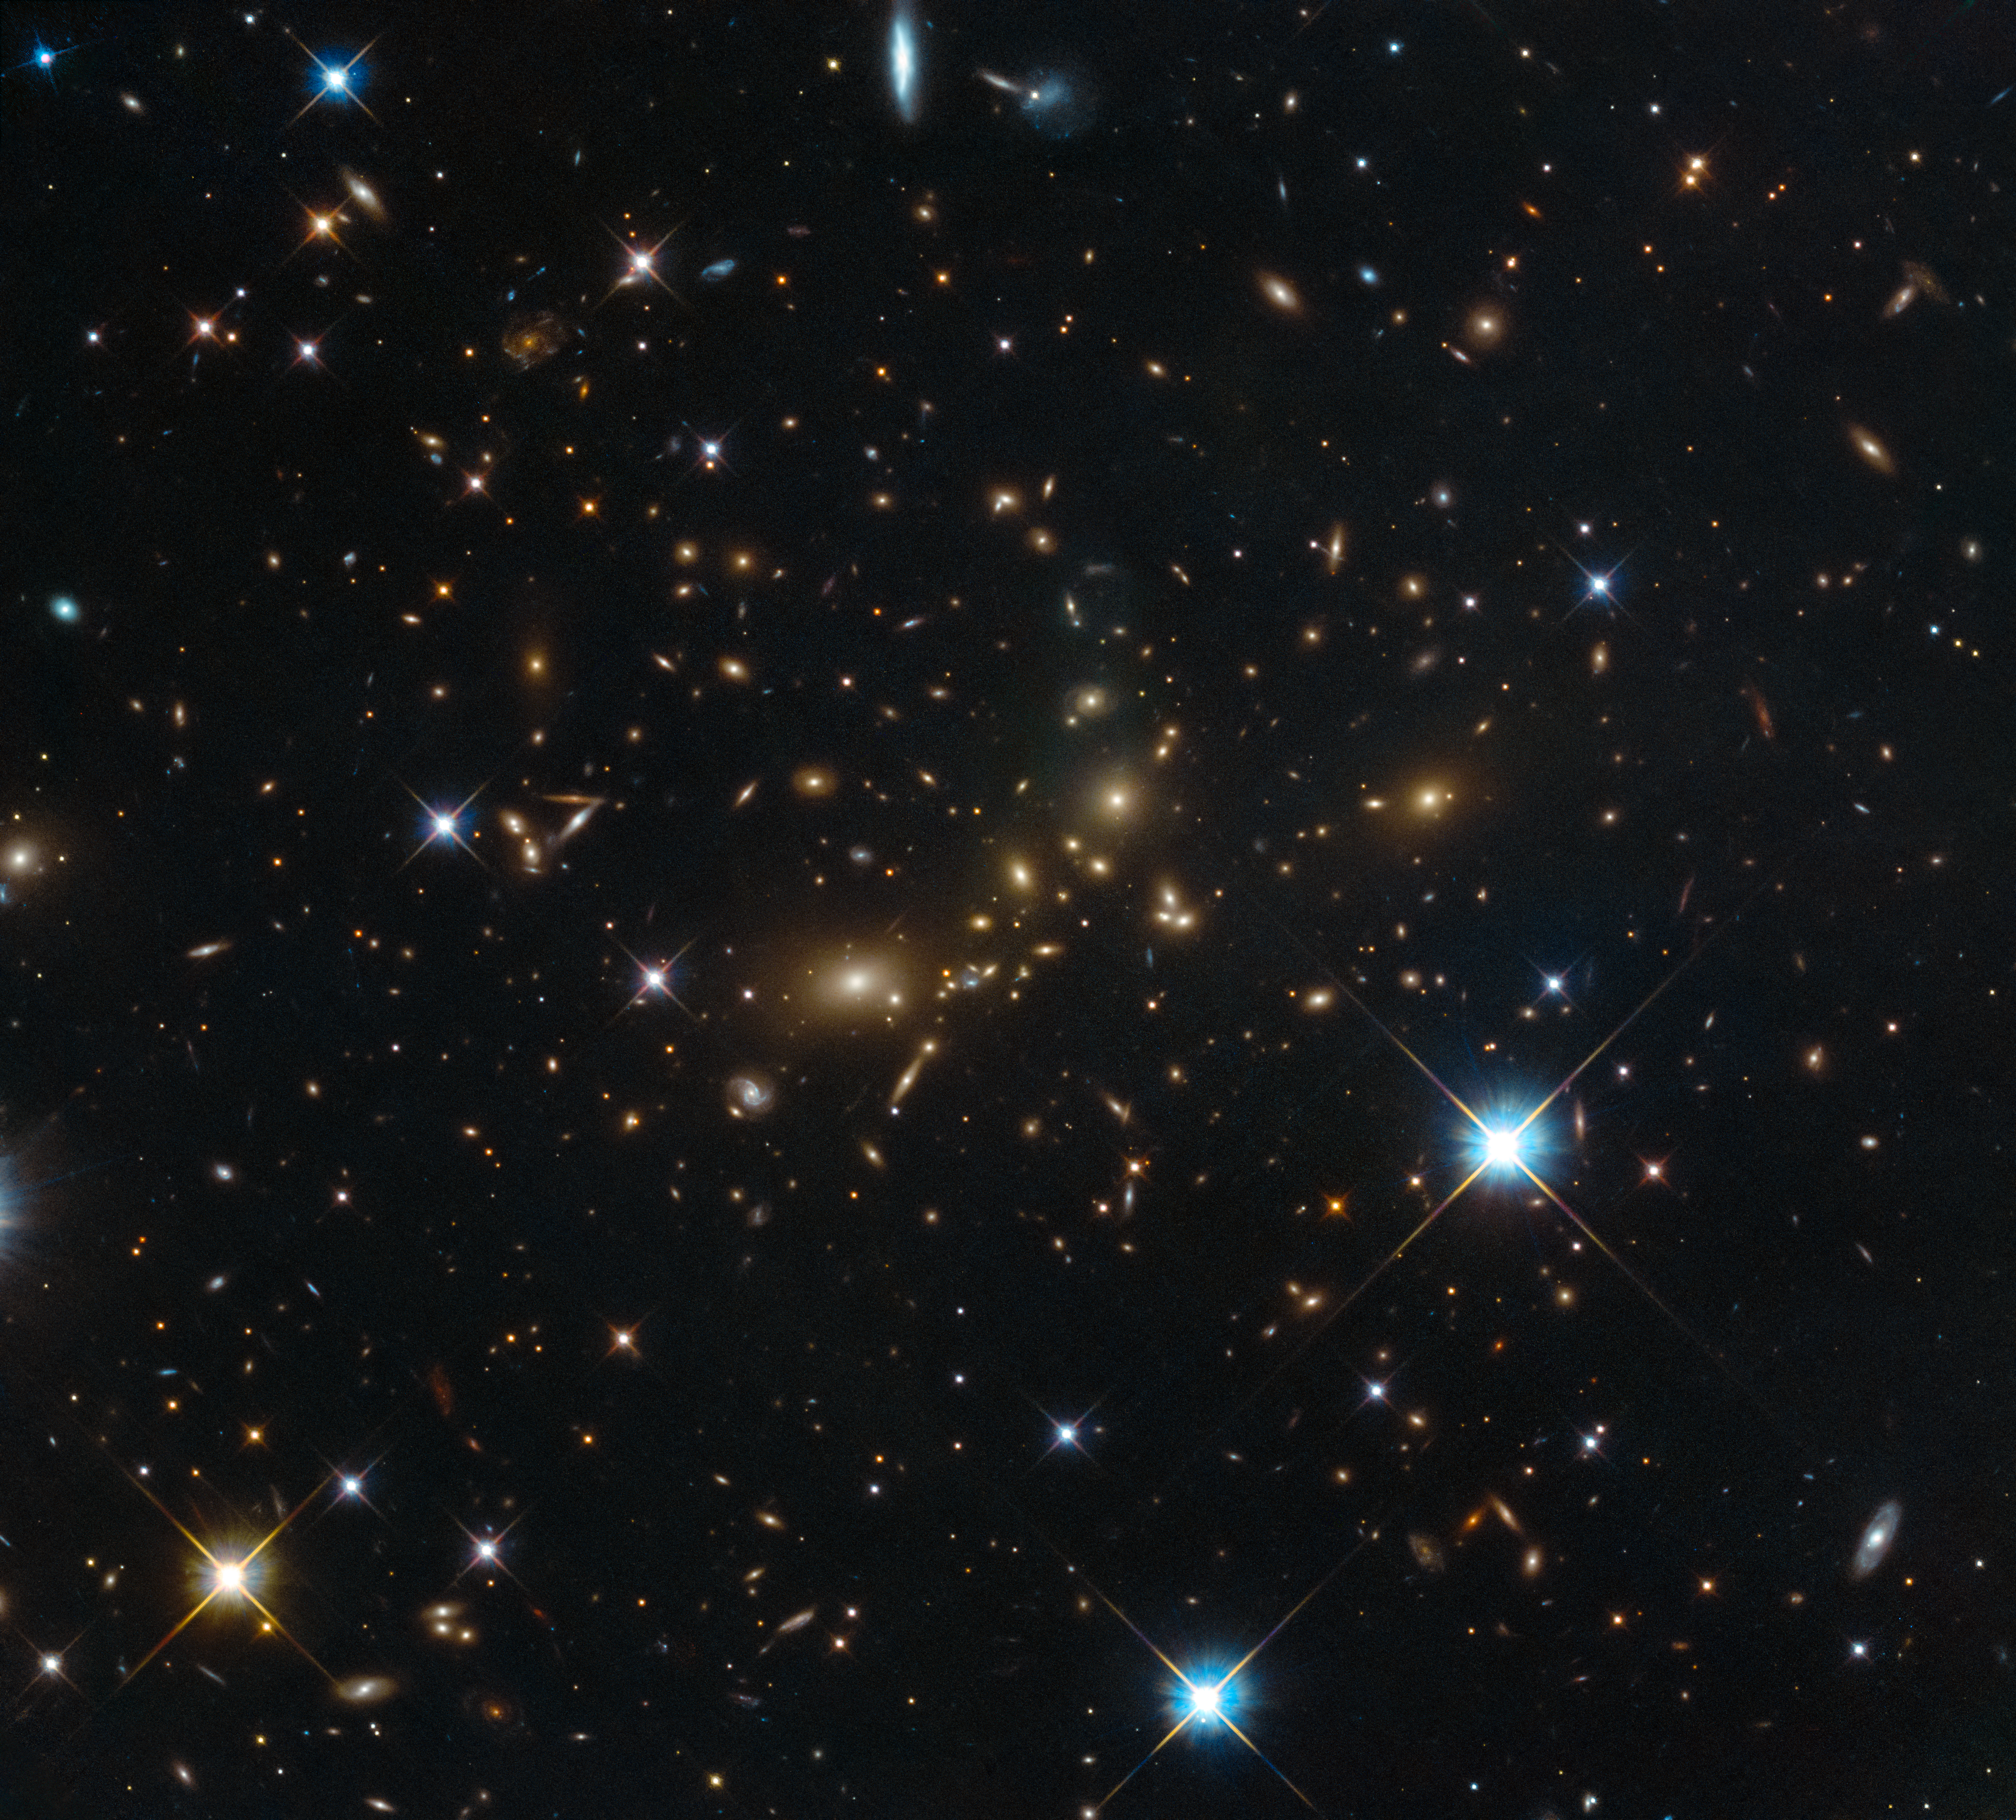

A colossal cluster

This NASA/ESA Hubble Space Telescope image shows a massive galaxy cluster glowing brightly in the darkness. Despite its beauty, this cluster bears the distinctly unpoetic name of PLCK_G308.3-20.2.

Galaxy clusters can contain thousands of galaxies all held together by the glue of gravity. At one point in time they were believed to be the largest structures in the Universe — until they were usurped in the 1980s by the discovery of superclusters, which typically contain dozens of galaxy clusters and groups and span hundreds of millions of light-years. However, clusters do have one thing to cling on to; superclusters are not held together by gravity, so galaxy clusters still retain the title of the biggest structures in the Universe bound by gravity.

One of the most interesting features of galaxy clusters is the stuff that permeates the space between the constituent galaxies: the intracluster medium (ICM). High temperatures are created in these spaces by smaller structures forming within the cluster. This results in the ICM being made up of plasma — ordinary matter in a superheated state. Most luminous matter in the cluster resides in the ICM, which is very luminous X-rays. However, the majority of the mass in a galaxy cluster exists in the form of non-luminous dark matter. Unlike plasma, dark matter is not made from ordinary matter such as protons, neutrons and electrons. It is a hypothesised substance thought to make up 80 % of the Universe’s mass, yet it has never been directly observed.

This image was taken by Hubble’s Advanced Camera for Surveys and Wide-Field Camera 3 as part of an observing programme called RELICS (Reionization Lensing Cluster Survey). RELICS imaged 41 massive galaxy clusters with the aim of finding the brightest distant galaxies for the forthcoming NASA/ESA/CSA James Webb Space Telescope (JWST) to study.

Credit: ESA/Hubble & NASA, RELICS